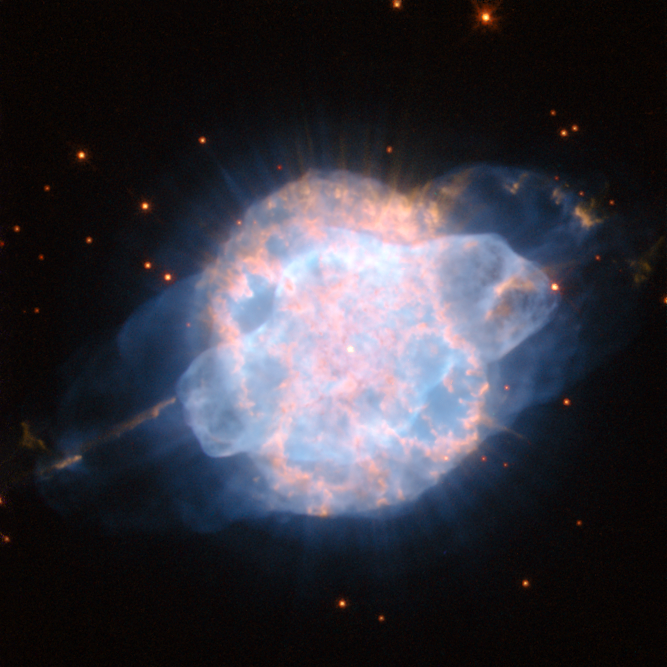

A piercing eye in the sky

This dramatic image from the NASA/ESA Hubble Space Telescope shows the planetary nebula NGC 3918, a brilliant cloud of colourful gas in the constellation of Centaurus, around 4900 light-years from Earth.

In the centre of the cloud of gas, and completely dwarfed by the nebula, are the dying remnants of a red giant. During the final convulsive phase in the evolution of these stars, huge clouds of gas are ejected from the surface of the star before it emerges from its cocoon as a white dwarf. The intense ultraviolet radiation from the tiny remnant star then causes the surrounding gas to glow like a fluorescent sign. These extraordinary and colourful planetary nebulae are among the most dramatic sights in the night sky, and often have strange and irregular shapes, which are not yet fully explained.

NGC 3918’s distinctive eye-like shape, with a bright inner shell of gas and a more diffuse outer shell that extends far from the nebula looks as if it could be the result of two separate ejections of gas. But this is in fact not the case: studies of the object suggest that they were formed at the same time, but are being blown from the star at different speeds. The powerful jets of gas emerging from the ends of the large structure are estimated to be shooting away from the star at speeds of up to 350 000 kilometres per hour.

By the standards of astronomical phenomena, planetary nebulae like NGC 3918 are very short-lived, with a lifespan of just a few tens of thousands of years.

The image is a composite of visible and near-infrared snapshots taken with Hubble’s Wide Field Planetary Camera 2. The filters used were F658N, F814W, F555W and F502N, seen in red, orange, green and blue respectively. The image is about 20 arcseconds across.

Credit: ESA/Hubble and NASA